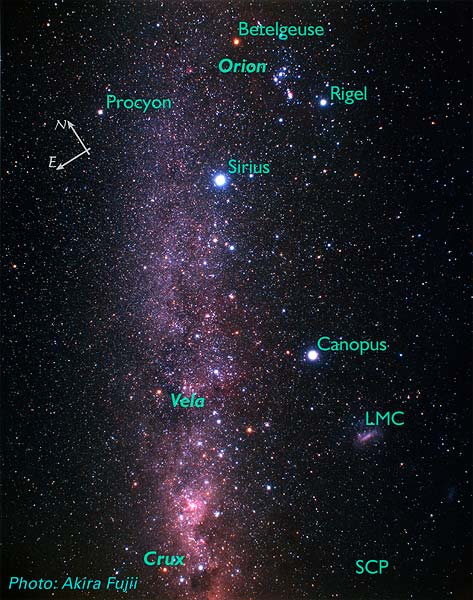

Vela and Surrounding Constellations (ground-based image)

Labeled with prominent features and showing location of Ha image.

Credit: Akira Fujii